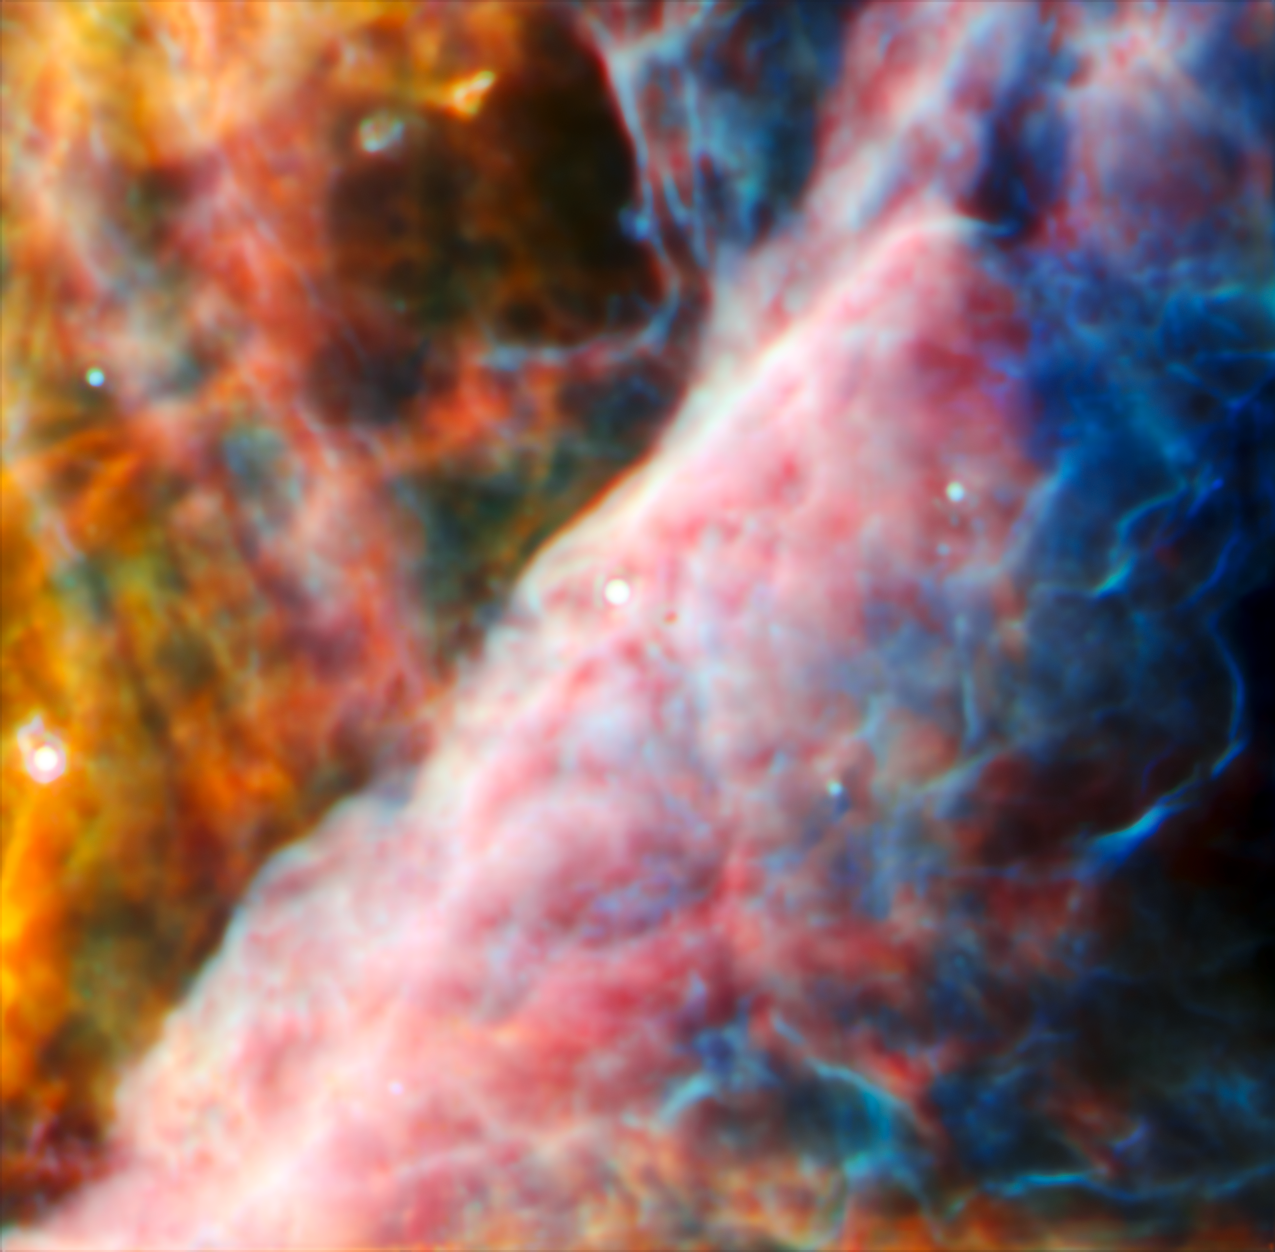

The Orion Bar region (upscaled MIRI image)

An international team of scientists have used data collected by the NASA/ESA/CSA James Webb Space Telescope to detect a molecule known as the methyl cation (CH3+) for the first time, located in the protoplanetary disc surrounding a young star. They accomplished this feat with a cross-disciplinary expert analysis, including key input from laboratory spectroscopists. The vital role of CH3+ in interstellar carbon chemistry has been predicted since the 1970s, but Webb’s unique capabilities have finally made observing it possible — in a region of space where planets capable of accommodating life could eventually form.

This hazy image is Webb’s view of a small region of the Orion Nebula, made with its MIRI instrument. Filled with gas and dust, the Orion Nebula is a rich star-forming region. The newborn and young stars emit harsh ultraviolet radiation that ionises the nebula, causing it to emit light at infrared wavelengths. MIRI is sensitive to long-wavelength, mid-infrared emission, highlighting the layers of hot gases on each side of the Orion Bar that stretches through the centre. The area captured here by MIRI is much smaller than the NIRCam view, but contains a remarkable amount of detail, thanks to MIRI’s unprecedented sensitivity at these longer wavelengths.

This zoomed-in MIRI view of the Orion Bar contains the young star-protoplanetary disc system, named d203-506, that the team of astronomers scoured for key organic molecules. MIRI’s contribution to the view of d203-506 was critical to obtaining the widest range of spectra of the system, necessary to confirm their detection of the methyl cation. In particular, the molecule has a strong spectral line at around 7 microns, a wavelength that is impossible to detect through Earth’s atmosphere, but with MIRI’s in-built spectroscopy the team was able to unambiguously confirm the methyl cation’s presence.

This version of the MIRI image has been scaled up, to match the scale of the larger NIRCam image. You can find the image in its original scale here.

Credit: ESA/Webb, NASA, CSA, M. Zamani (ESA/Webb), the PDRs4All ERS Team